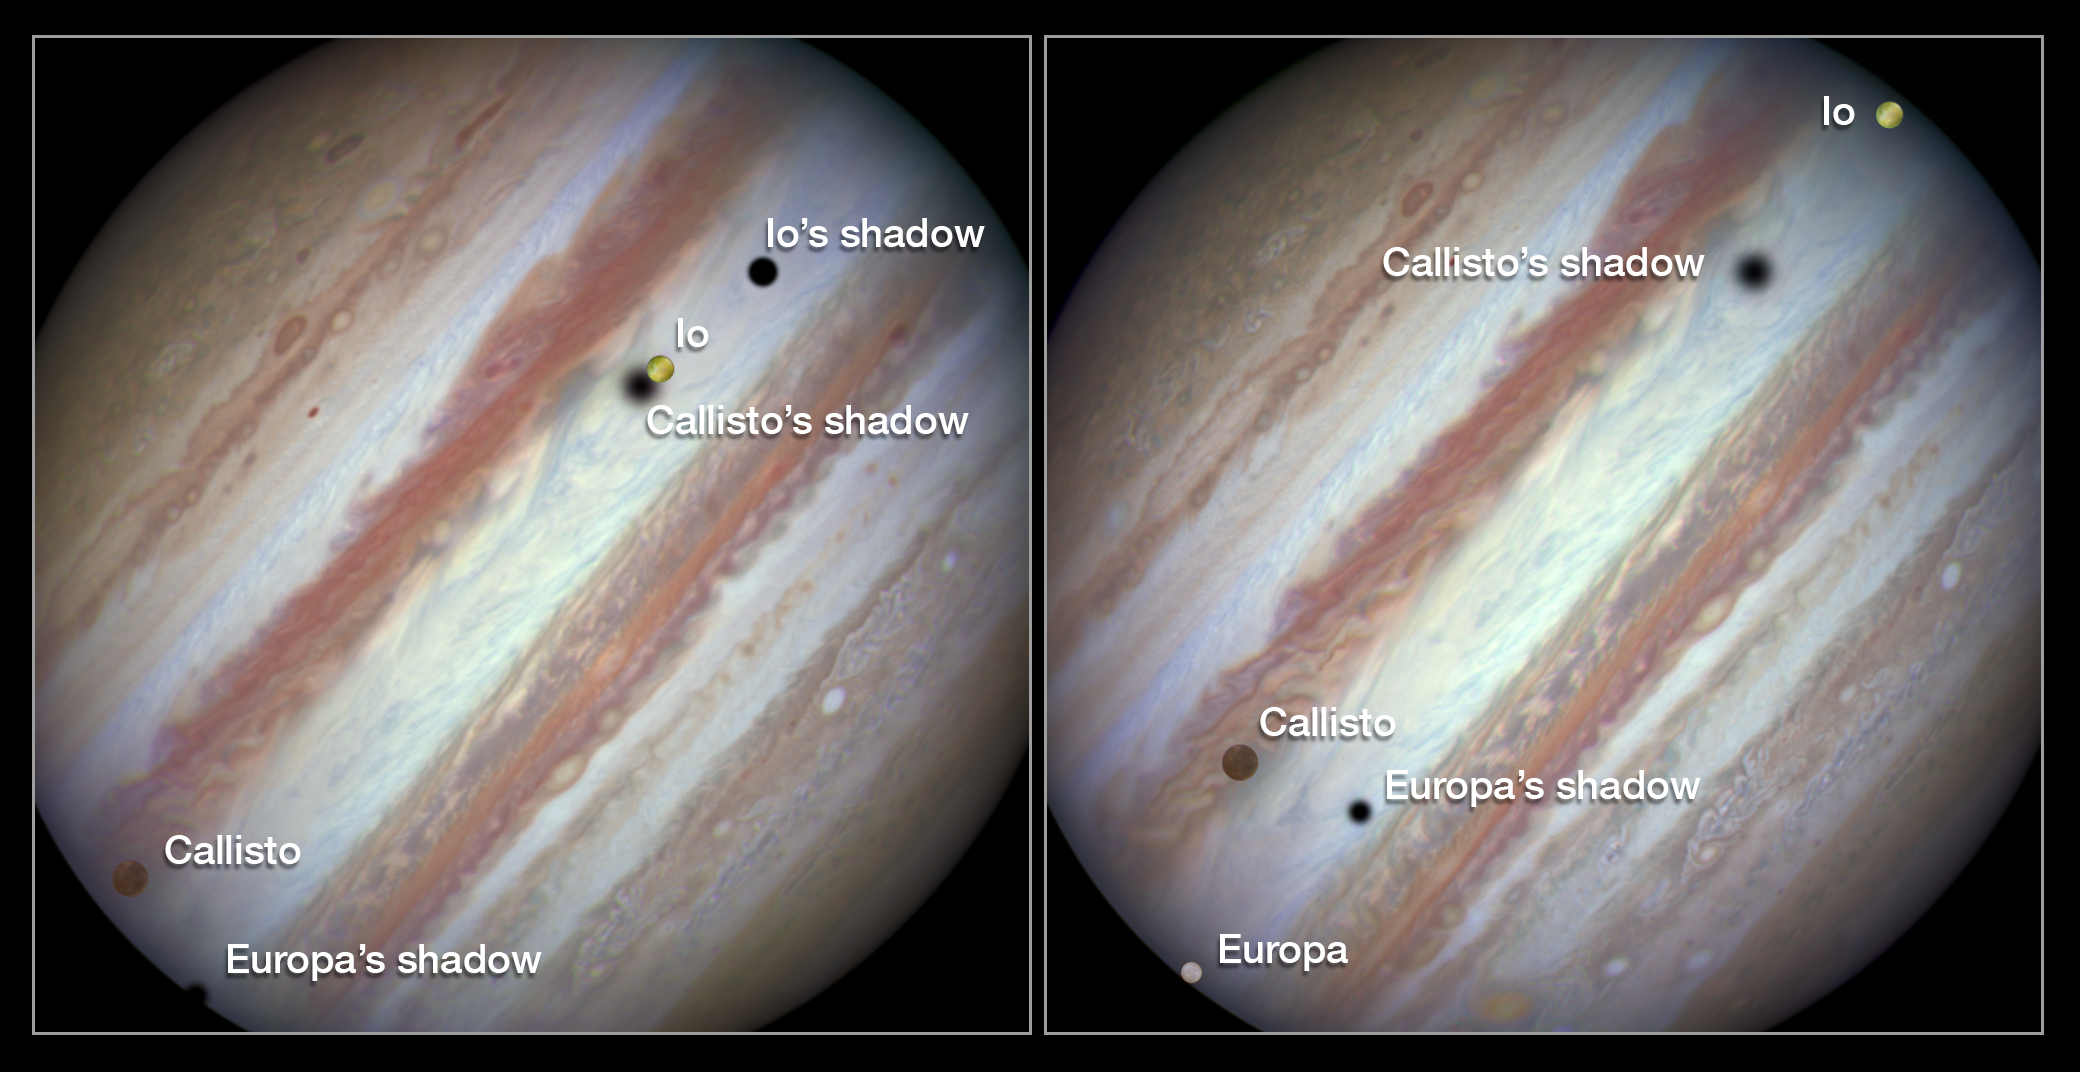

Three moons and their shadows parade across Jupiter — comparison of beginning and end of sequence, with annotations

These new NASA/ESA Hubble Space Telescope images capture a rare occurrence as three of Jupiter’s largest moons parade across the giant gas planet’s banded face.

The image on the left shows the Hubble observation at the beginning of the event. On the left is the moon Callisto and on the right, Io. The shadows from Europa, which cannot be seen in the image, Callisto and Io are strung out from left to right.

The image on the right shows the end of the event, approximately 42 minutes later. Europa has entered the frame at lower left with slower-moving Callisto above and to the right of it. Meanwhile Io — which orbits significantly closer to Jupiter and so appears to move much more quickly — is approaching the eastern limb of the planet. Whilst Callisto’s shadow seems hardly to have moved Io’s has set over the planet’s eastern edge and Europa’s has risen further in the west.

The movement of the moons is shown in the video created from Hubble stills.

Credit: NASA, ESA, Hubble Heritage Team